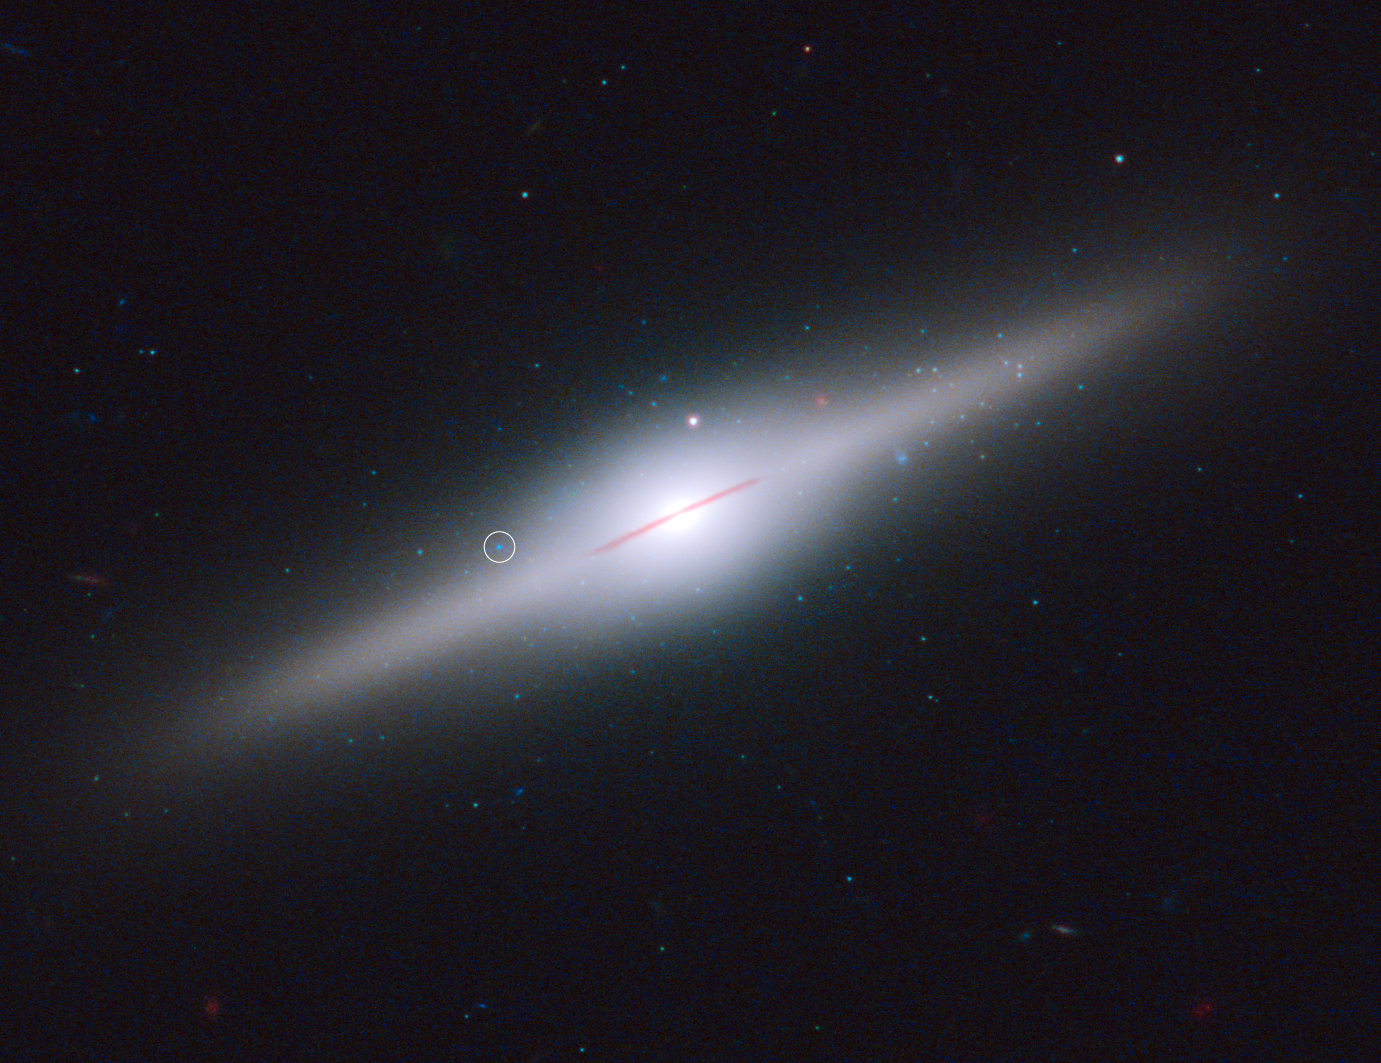

Star cluster surrounds wayward black hole in cannibal galaxy ESO 243-49 (labelled)

This spectacular edge-on galaxy, called ESO 243-49, is home to an intermediate-mass black hole that may have been purloined from a cannibalised dwarf galaxy. The black hole, with an estimated mass of 20 000 Suns, lies above the galactic plane. This is an unlikely place for such a massive back hole to exist, unless it belonged to a small galaxy that was gravitationally torn apart by ESO 243-49.

The circle identifies a unique X-ray source that pinpoints the black hole. The X-rays are believed to be radiation from a hot accretion disc around the black hole. The blue light not only comes from a hot accretion disc, but also from a cluster of hot young stars that formed around the black hole. The galaxy is 290 million light-years from Earth. Hubble can’t resolve the stars individually because the suspected cluster is too far away. Their presence is inferred from the colour and brightness of the light coming from the black hole’s location.

Credit: NASA, ESA, and S. Farrell (University of Sydney, Australia and University of Leicester, UK)